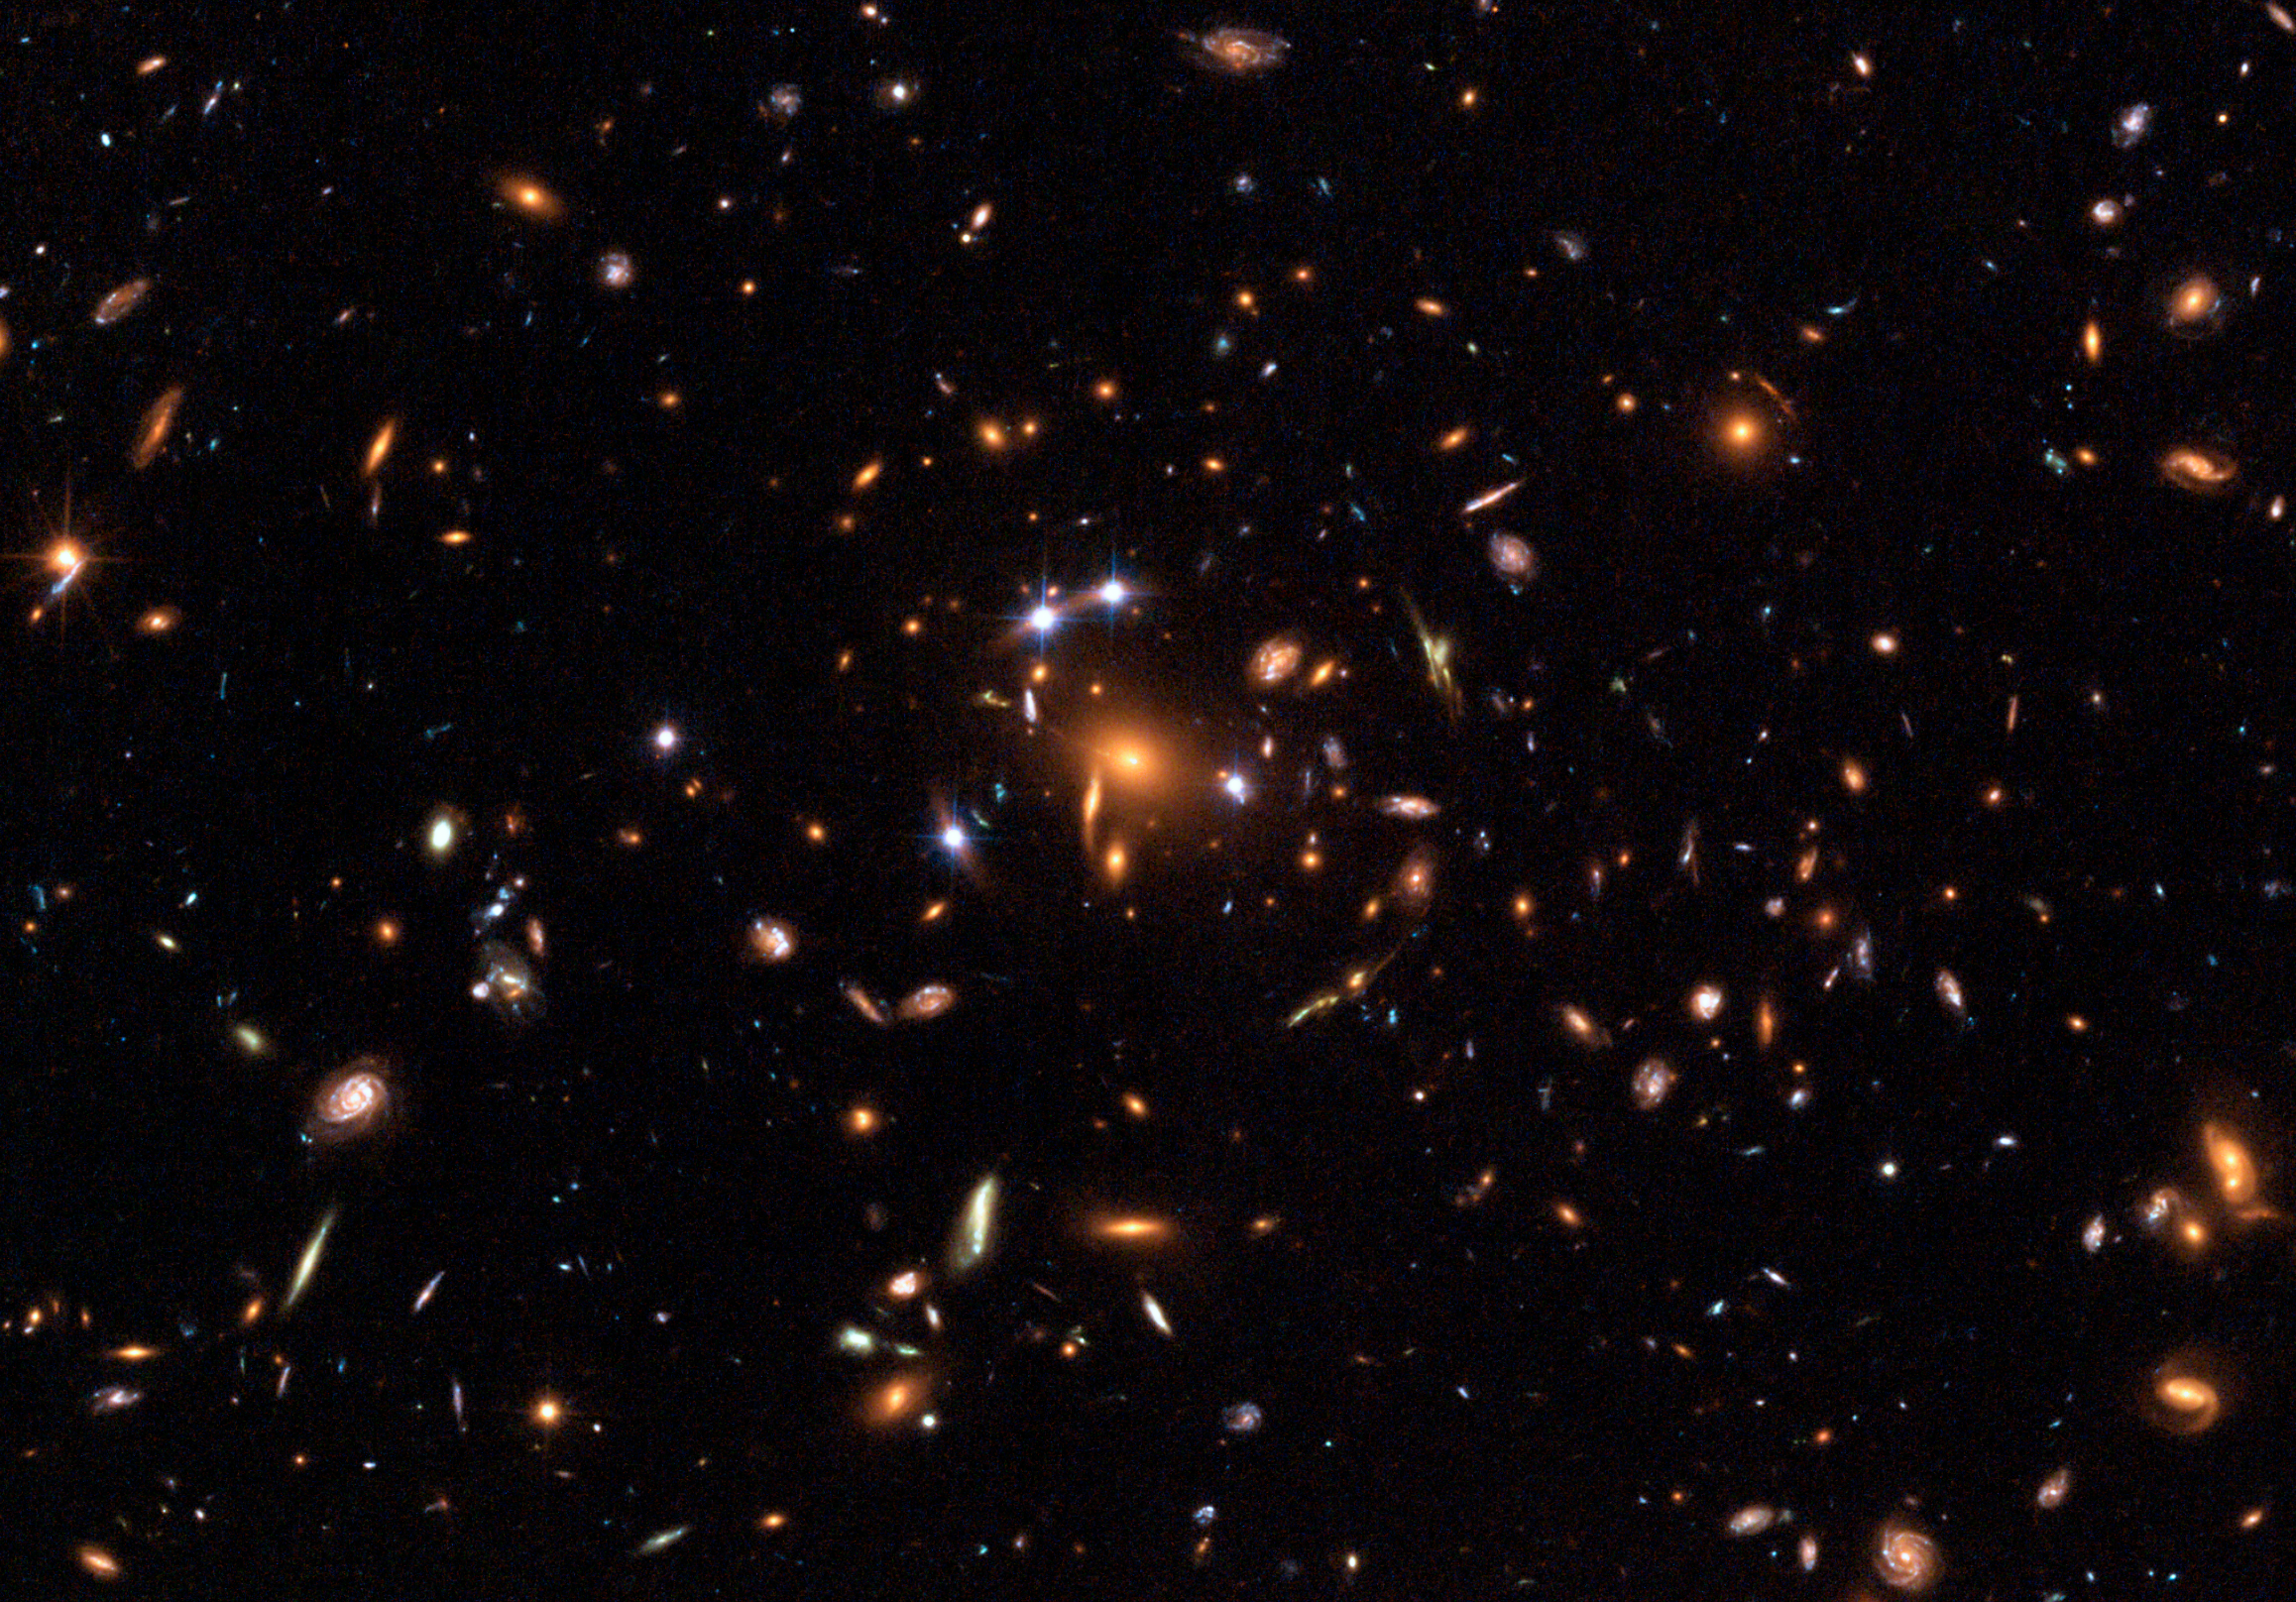

Hubble captures a "five-star" rated gravitational lens

This NASA/ESA Hubble Space Telescope image is the first-ever picture of a distant quasar lensed into five images. The group of five quasar images produced in a process called Gravitational Lensing, in which the gravitational field of a massive object - in this case, a cluster of galaxies - bends and amplifies light from an object - in this case, a quasar - farther behind it.

Although other multiply lensed quasars have been seen before, for instance in the object known as the "Einstein Cross", this newly observed "quintuple quasar" is the only case so far in which multiple quasar images are produced by an entire galaxy cluster acting as a gravitational lens.

Credit: European Space Agency, NASA, Keren Sharon (Tel-Aviv University) and Eran Ofek (CalTech)